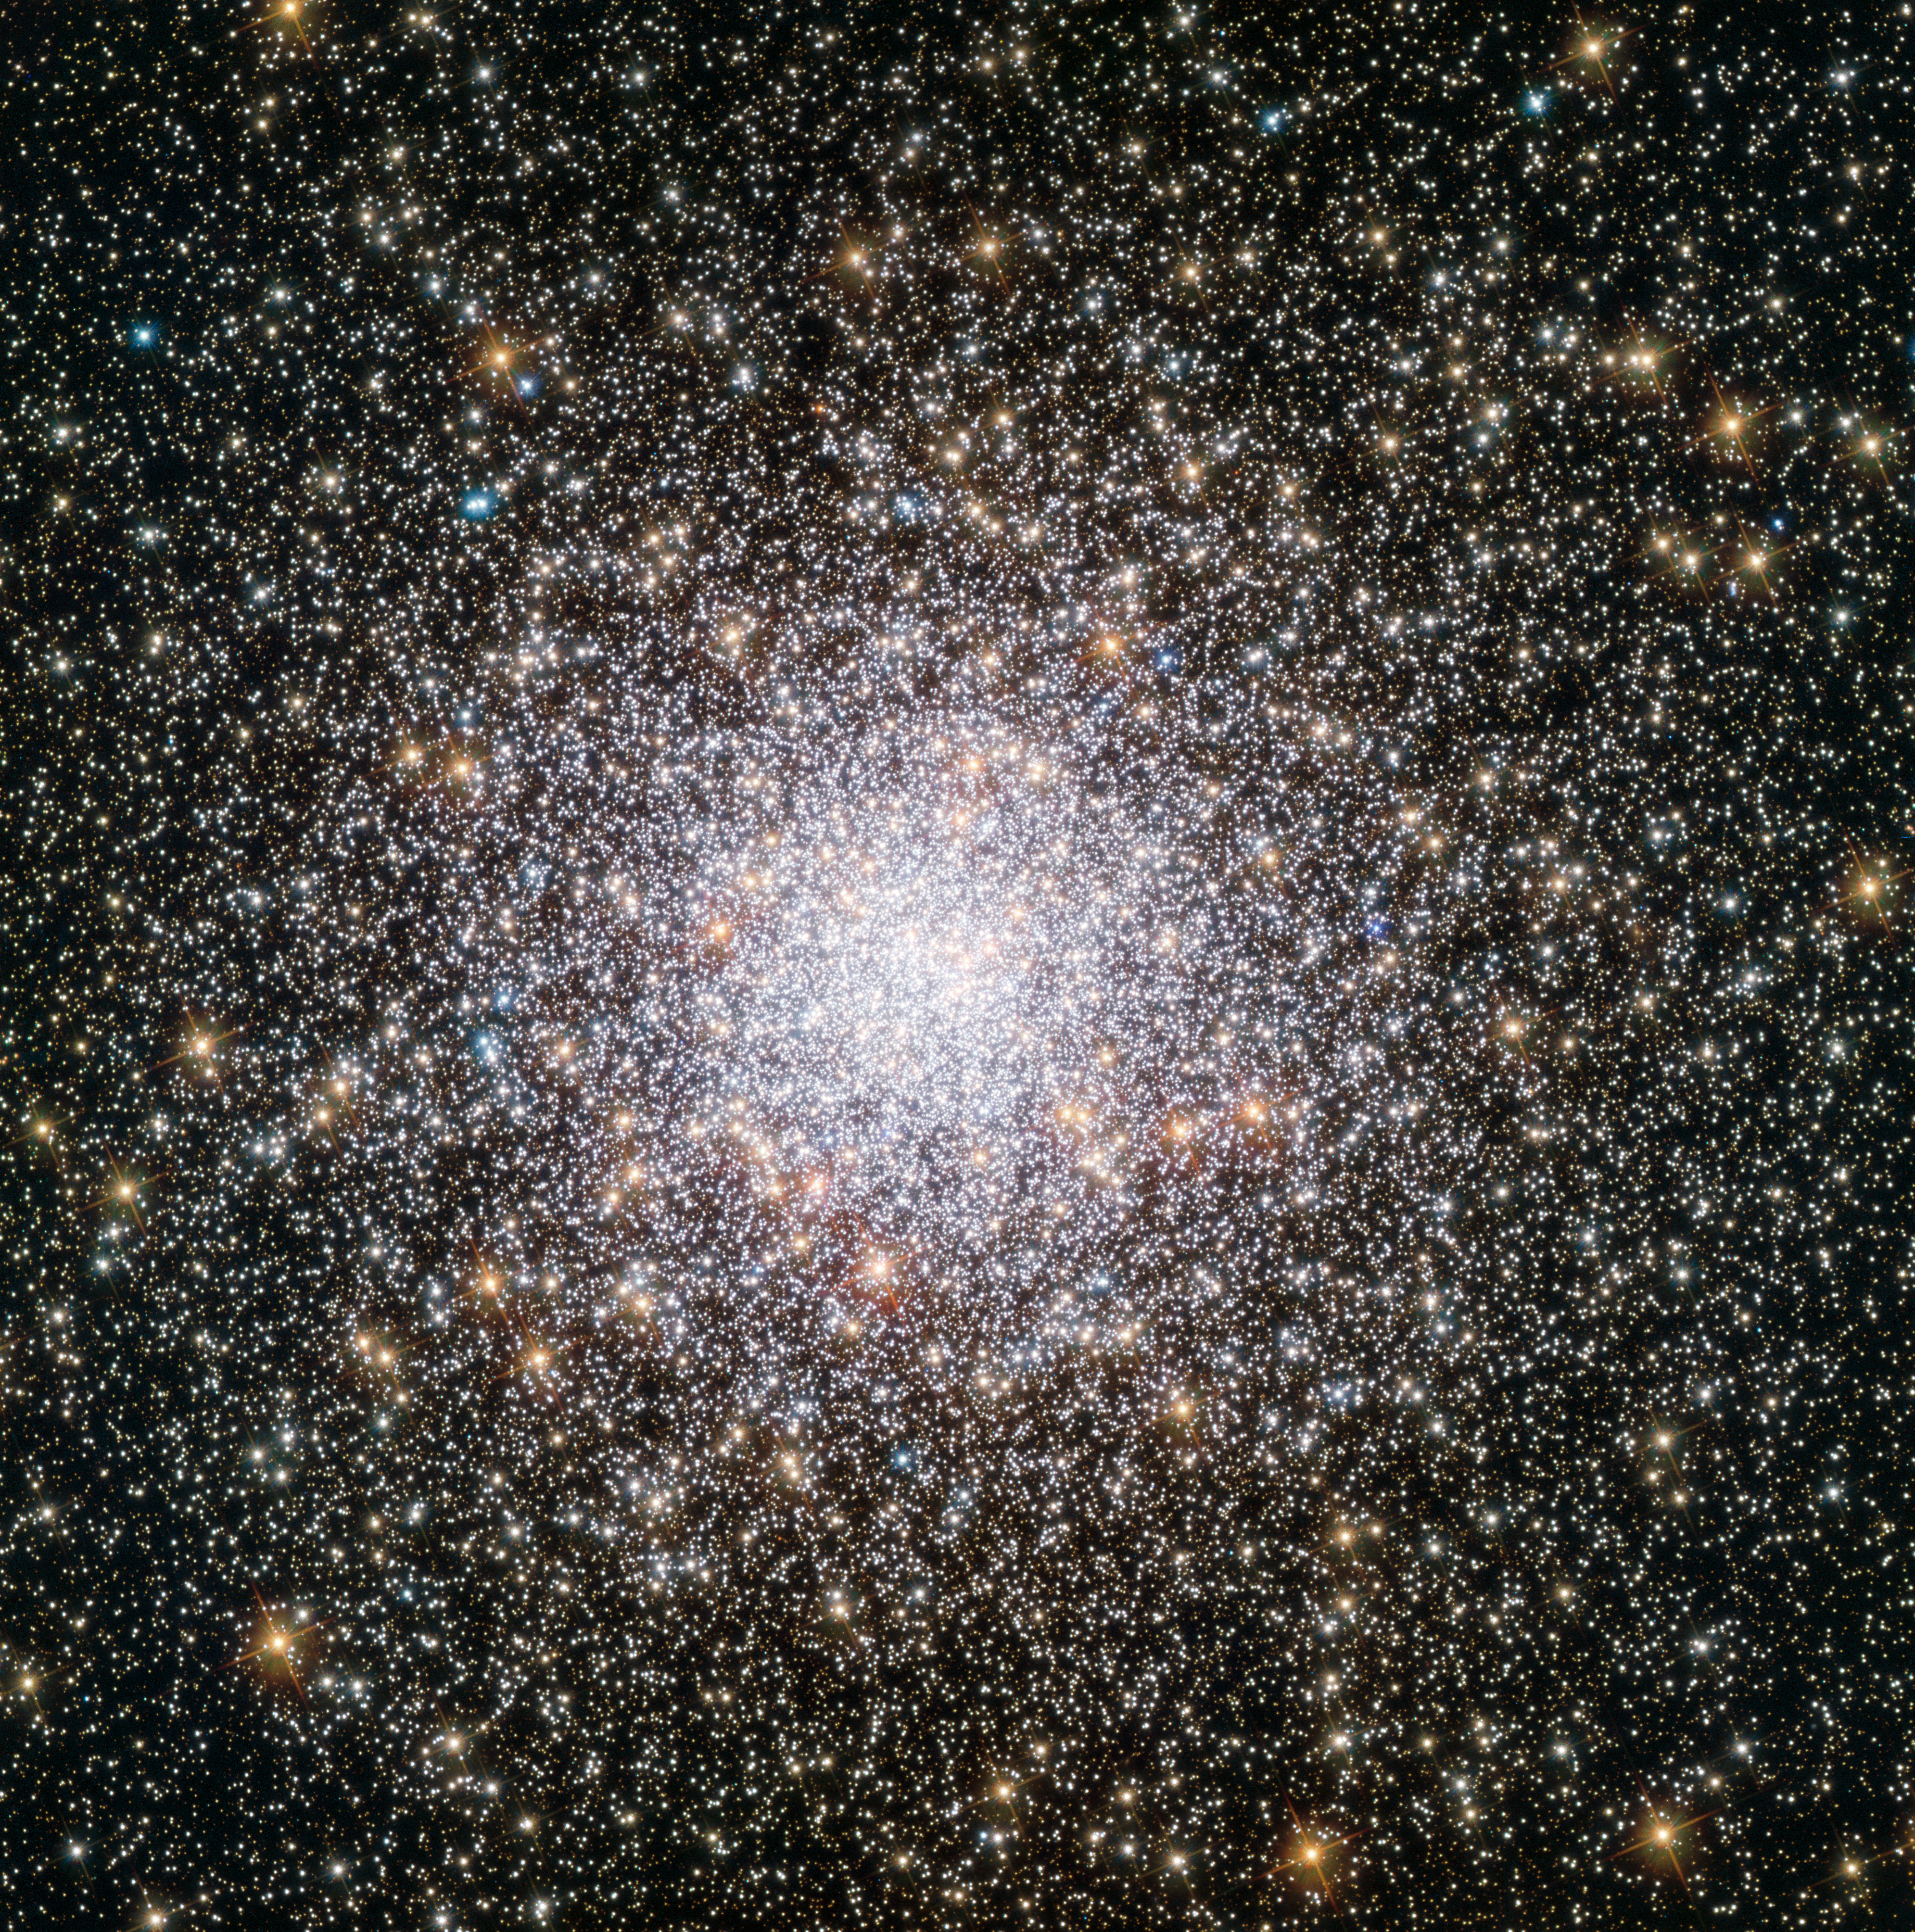

Youthful NGC 362

Globular clusters offer some of the most spectacular sights in the night sky. These ornate spheres contain hundreds of thousands of stars, and reside in the outskirts of galaxies. The Milky Way contains over 150 such clusters — and the one shown in this NASA/ESA Hubble Space Telescope image, named NGC 362, is one of the more unusual ones.

As stars make their way through life they fuse elements together in their cores, creating heavier and heavier elements — known in astronomy as metals — in the process. When these stars die, they flood their surroundings with the material they have formed during their lifetimes, enriching the interstellar medium with metals. Stars that form later therefore contain higher proportions of metals than their older relatives.

By studying the different elements present within individual stars in NGC 362, astronomers discovered that the cluster boasts a surprisingly high metal content, indicating that it is younger than expected. Although most globular clusters are much older than the majority of stars in their host galaxy, NGC 362 bucks the trend, with an age lying between 10 and 11 billion years old. For reference, the age of the Milky Way is estimated to be above 13 billion years.

This image, in which you can view NGC 362’s individual stars, was taken by Hubble’s Advanced Camera for Surveys (ACS).

Credit: ESA/Hubble & NASA